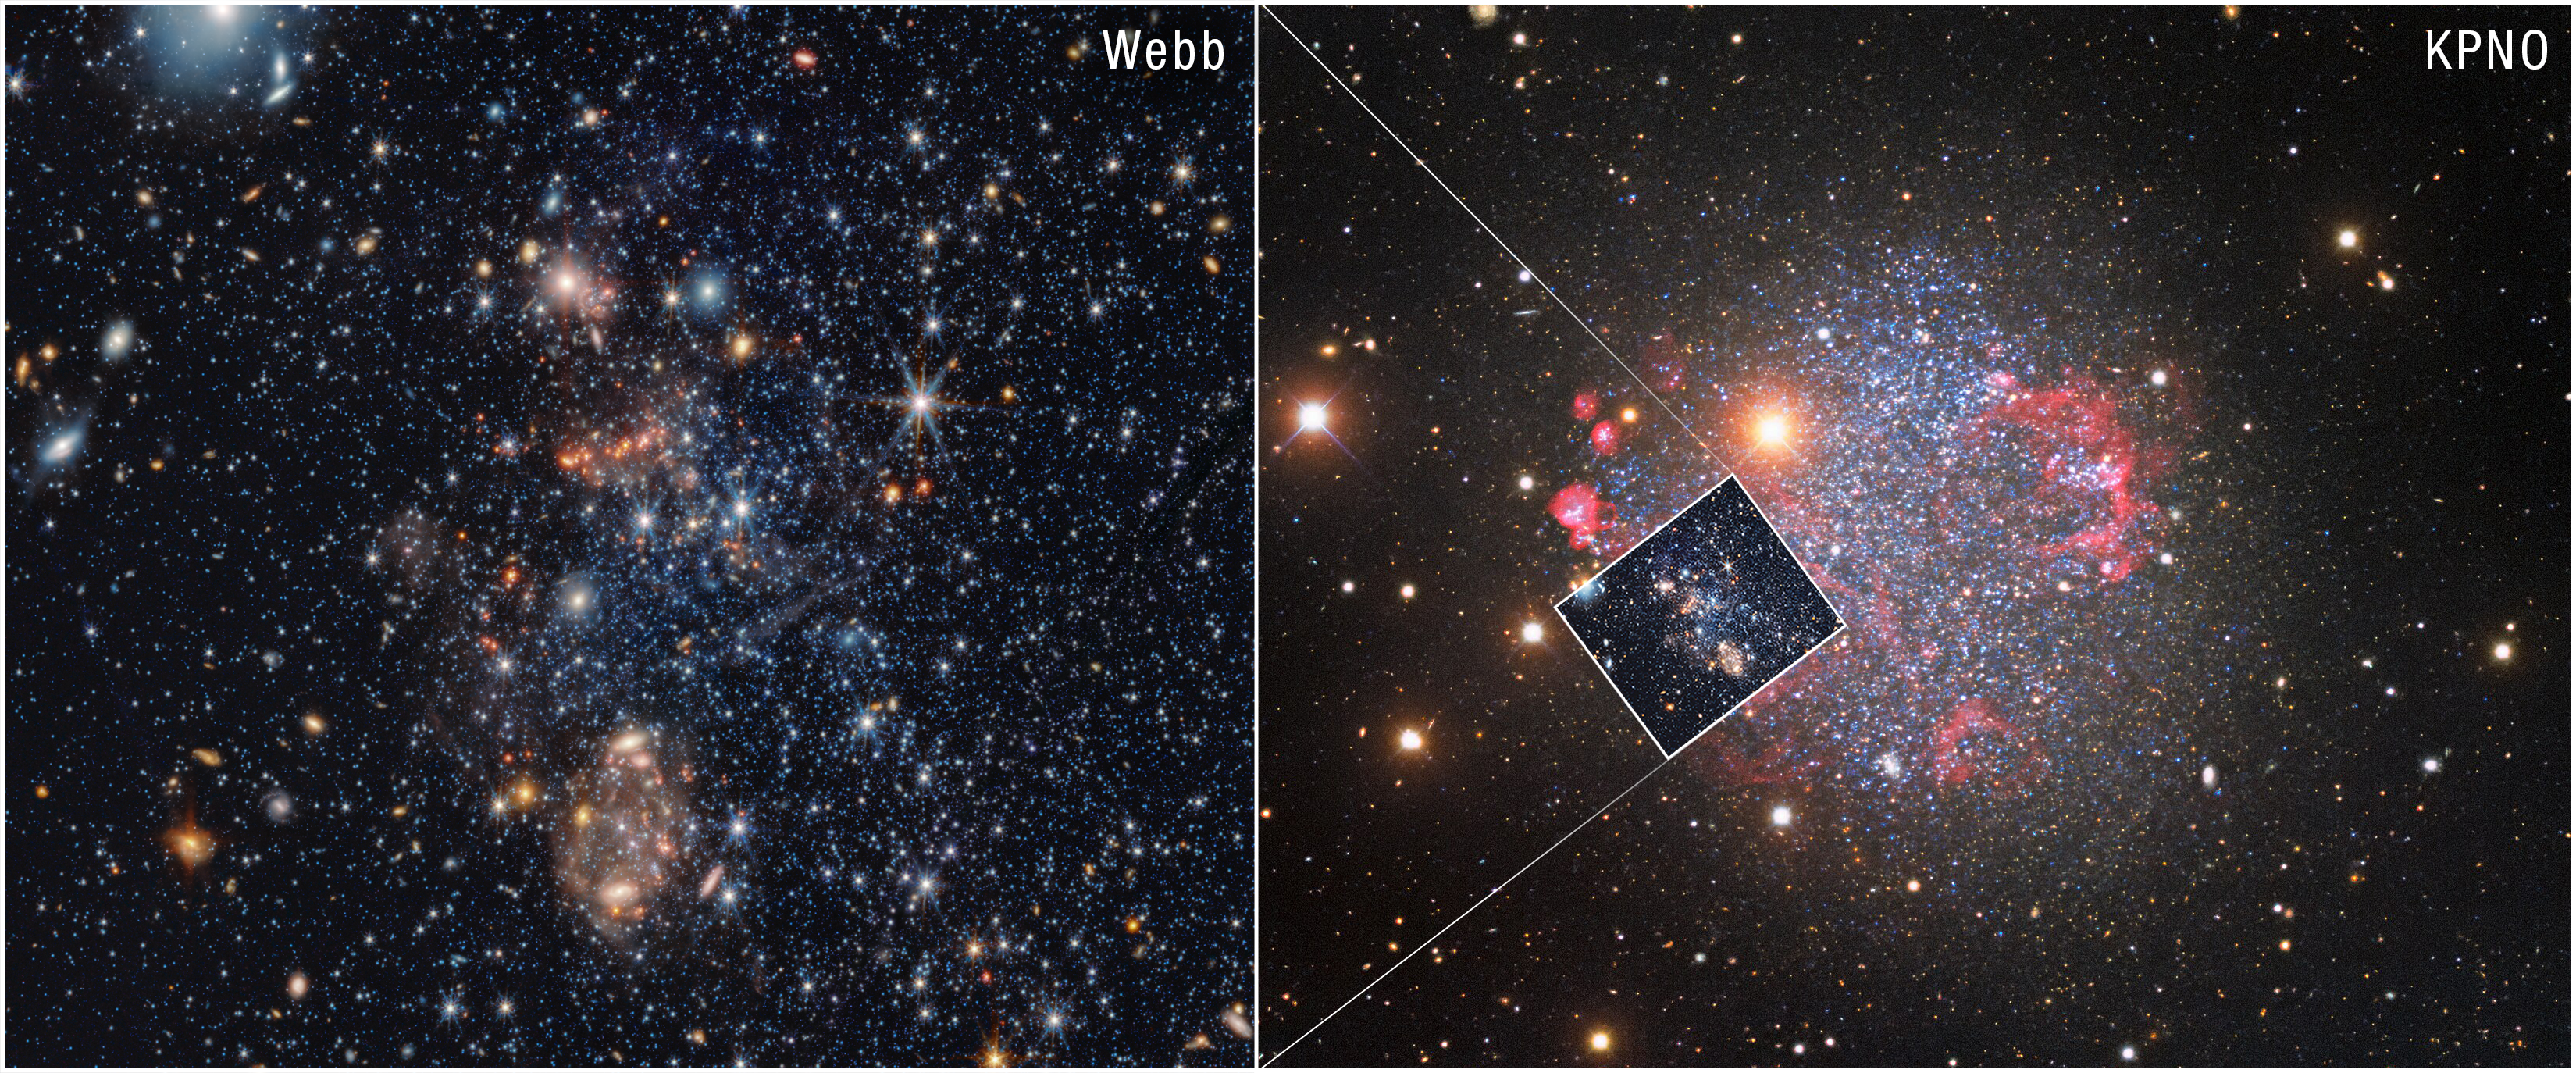

Sextans A PAHs pull-out (NIRCam and MIRI image)

Using the NASA/ESA/CSA James Webb Space Telescope, astronomers have spotted two rare kinds of dust in the dwarf galaxy Sextans A, one of the most chemically primitive galaxies near the Milky Way. The finding of metallic iron dust and silicon carbide (SiC) produced by aging stars, along with tiny clumps of carbon-based molecules, shows that even when the Universe had only a fraction of today’s heavy elements, stars and the interstellar medium could still forge solid dust grains. This research with Webb is reshaping ideas about how early galaxies evolved and developed the building blocks for planets.

This Webb image of a portion of the nearby Sextans A galaxy is put into context using a ground-based image from the Nicholas U. Mayall 4-meter Telescope at Kitt Peak National Observatory. The image from Webb shows the galaxy in both near- and mid-infrared light, while Kitt Peak captures optical, or visible, light.

Sextans A is an irregular dwarf galaxy, and is only 4 million light-years away, which is close to the Milky Way in relative terms. It’s also a fairly small galaxy, measuring 5,000 light-years across (the Milky Way is about 100,000 light-years across). Sextans A is chemically primitive, meaning it has a very low content of metals heavier than hydrogen and helium.

The Webb image on the left was created with Webb data from proposal: 2391 (PI: J. Roman-Duval). More information about this result can be found here.

Credit: STScI, NASA, ESA, CSA, KPNO, NSF's NOIRLab, AURA, E. Tarantino (STScI), P. Massey (Lowell Obs.), G. Jacoby (NSF, AURA), C. Smith (NSF, AURA), Image Processing: A. Pagan (STScI), T. A. Rector (UAA), M. Zamani (NSF's NOIRLab), D. De Martin (NSF's NOIRLab)